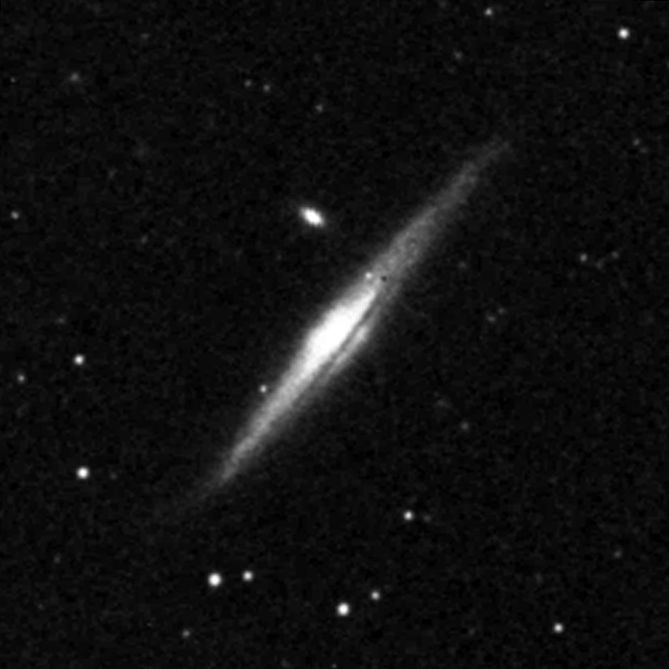

Central bulges of piral galaxies - NGC 5965 (ground-based view)

This ground based image represents a complete view of the spiral galaxy NGC 5965.

Credit: Allan Sandage (The Observatories of the Carnegie Institution of Washington) and John Bedke (Computer Sciences Corporation and the Space Telescope Science Institute)